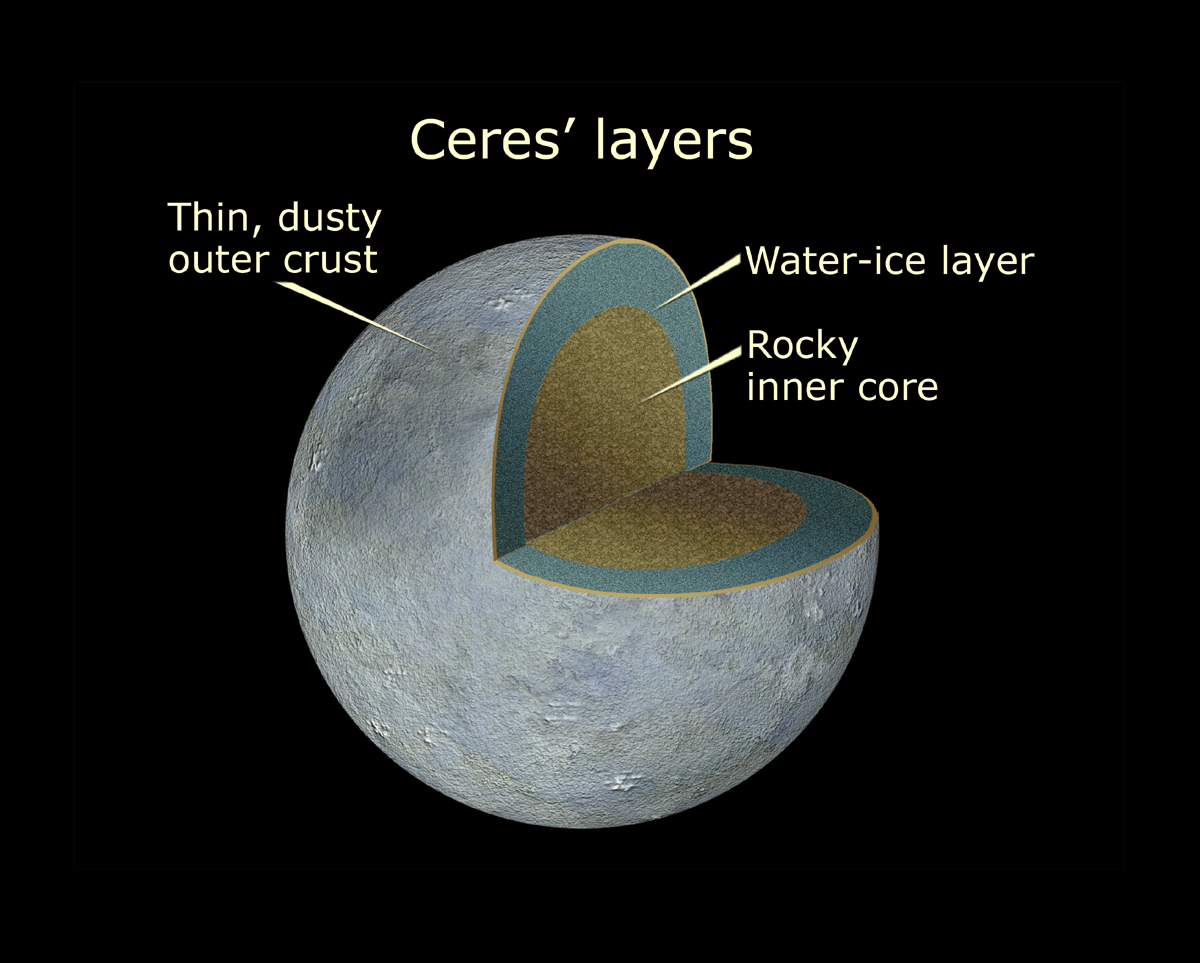

Cutaway View of Ceres

Cutaway of view of Ceres shows the differentiated layers of the asteroid.

Credit: NASA, ESA, and A. Feild (STScI)